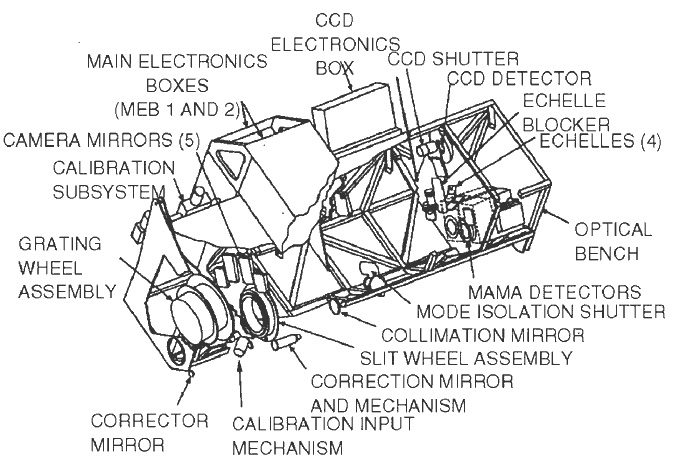

Space Telescope Imaging Spectrograph (STIS)

This image shows a diagram of the STIS, a spectrograph with a camera mode, installed on the Hubble Space Telescope. It operated continuously from 1997 to 2004, when a power failure rendered it inoperable. The instrument was successfully repaired in 2009 during Servicing Mission 4 and science operations have now been resumed.

Credit: ESA/NASA/Hubble